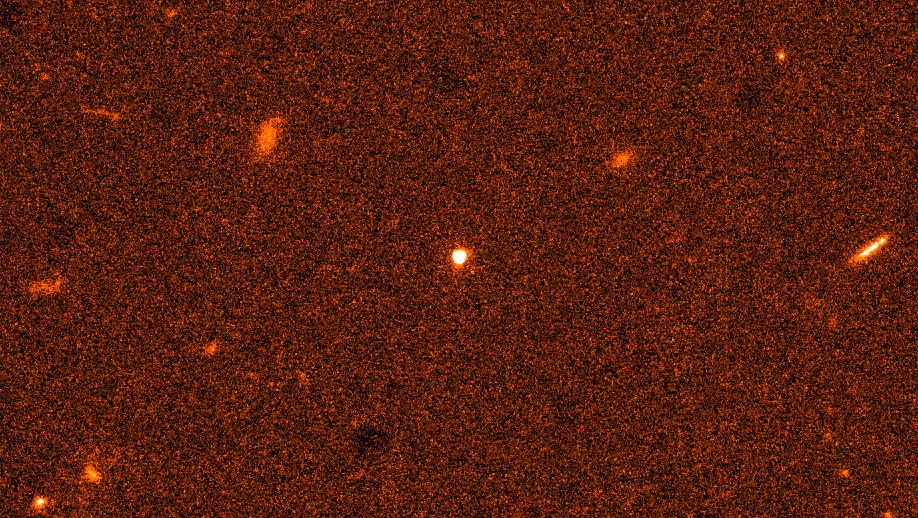

Mysterious fireball from a cataclysmic explosion

The visible fireball from a titanic explosion in deep space, called a gamma-ray burst, blazes in the center of this image, taken with the CCD camera (Charge Coupled Device) on the Space Telescope Imaging Spectrograph, a new instrument on Hubble Space Telescope.

Credit: Elena Pian (ITESRC), Andrew Fruchter (STScI), and NASA/ESA